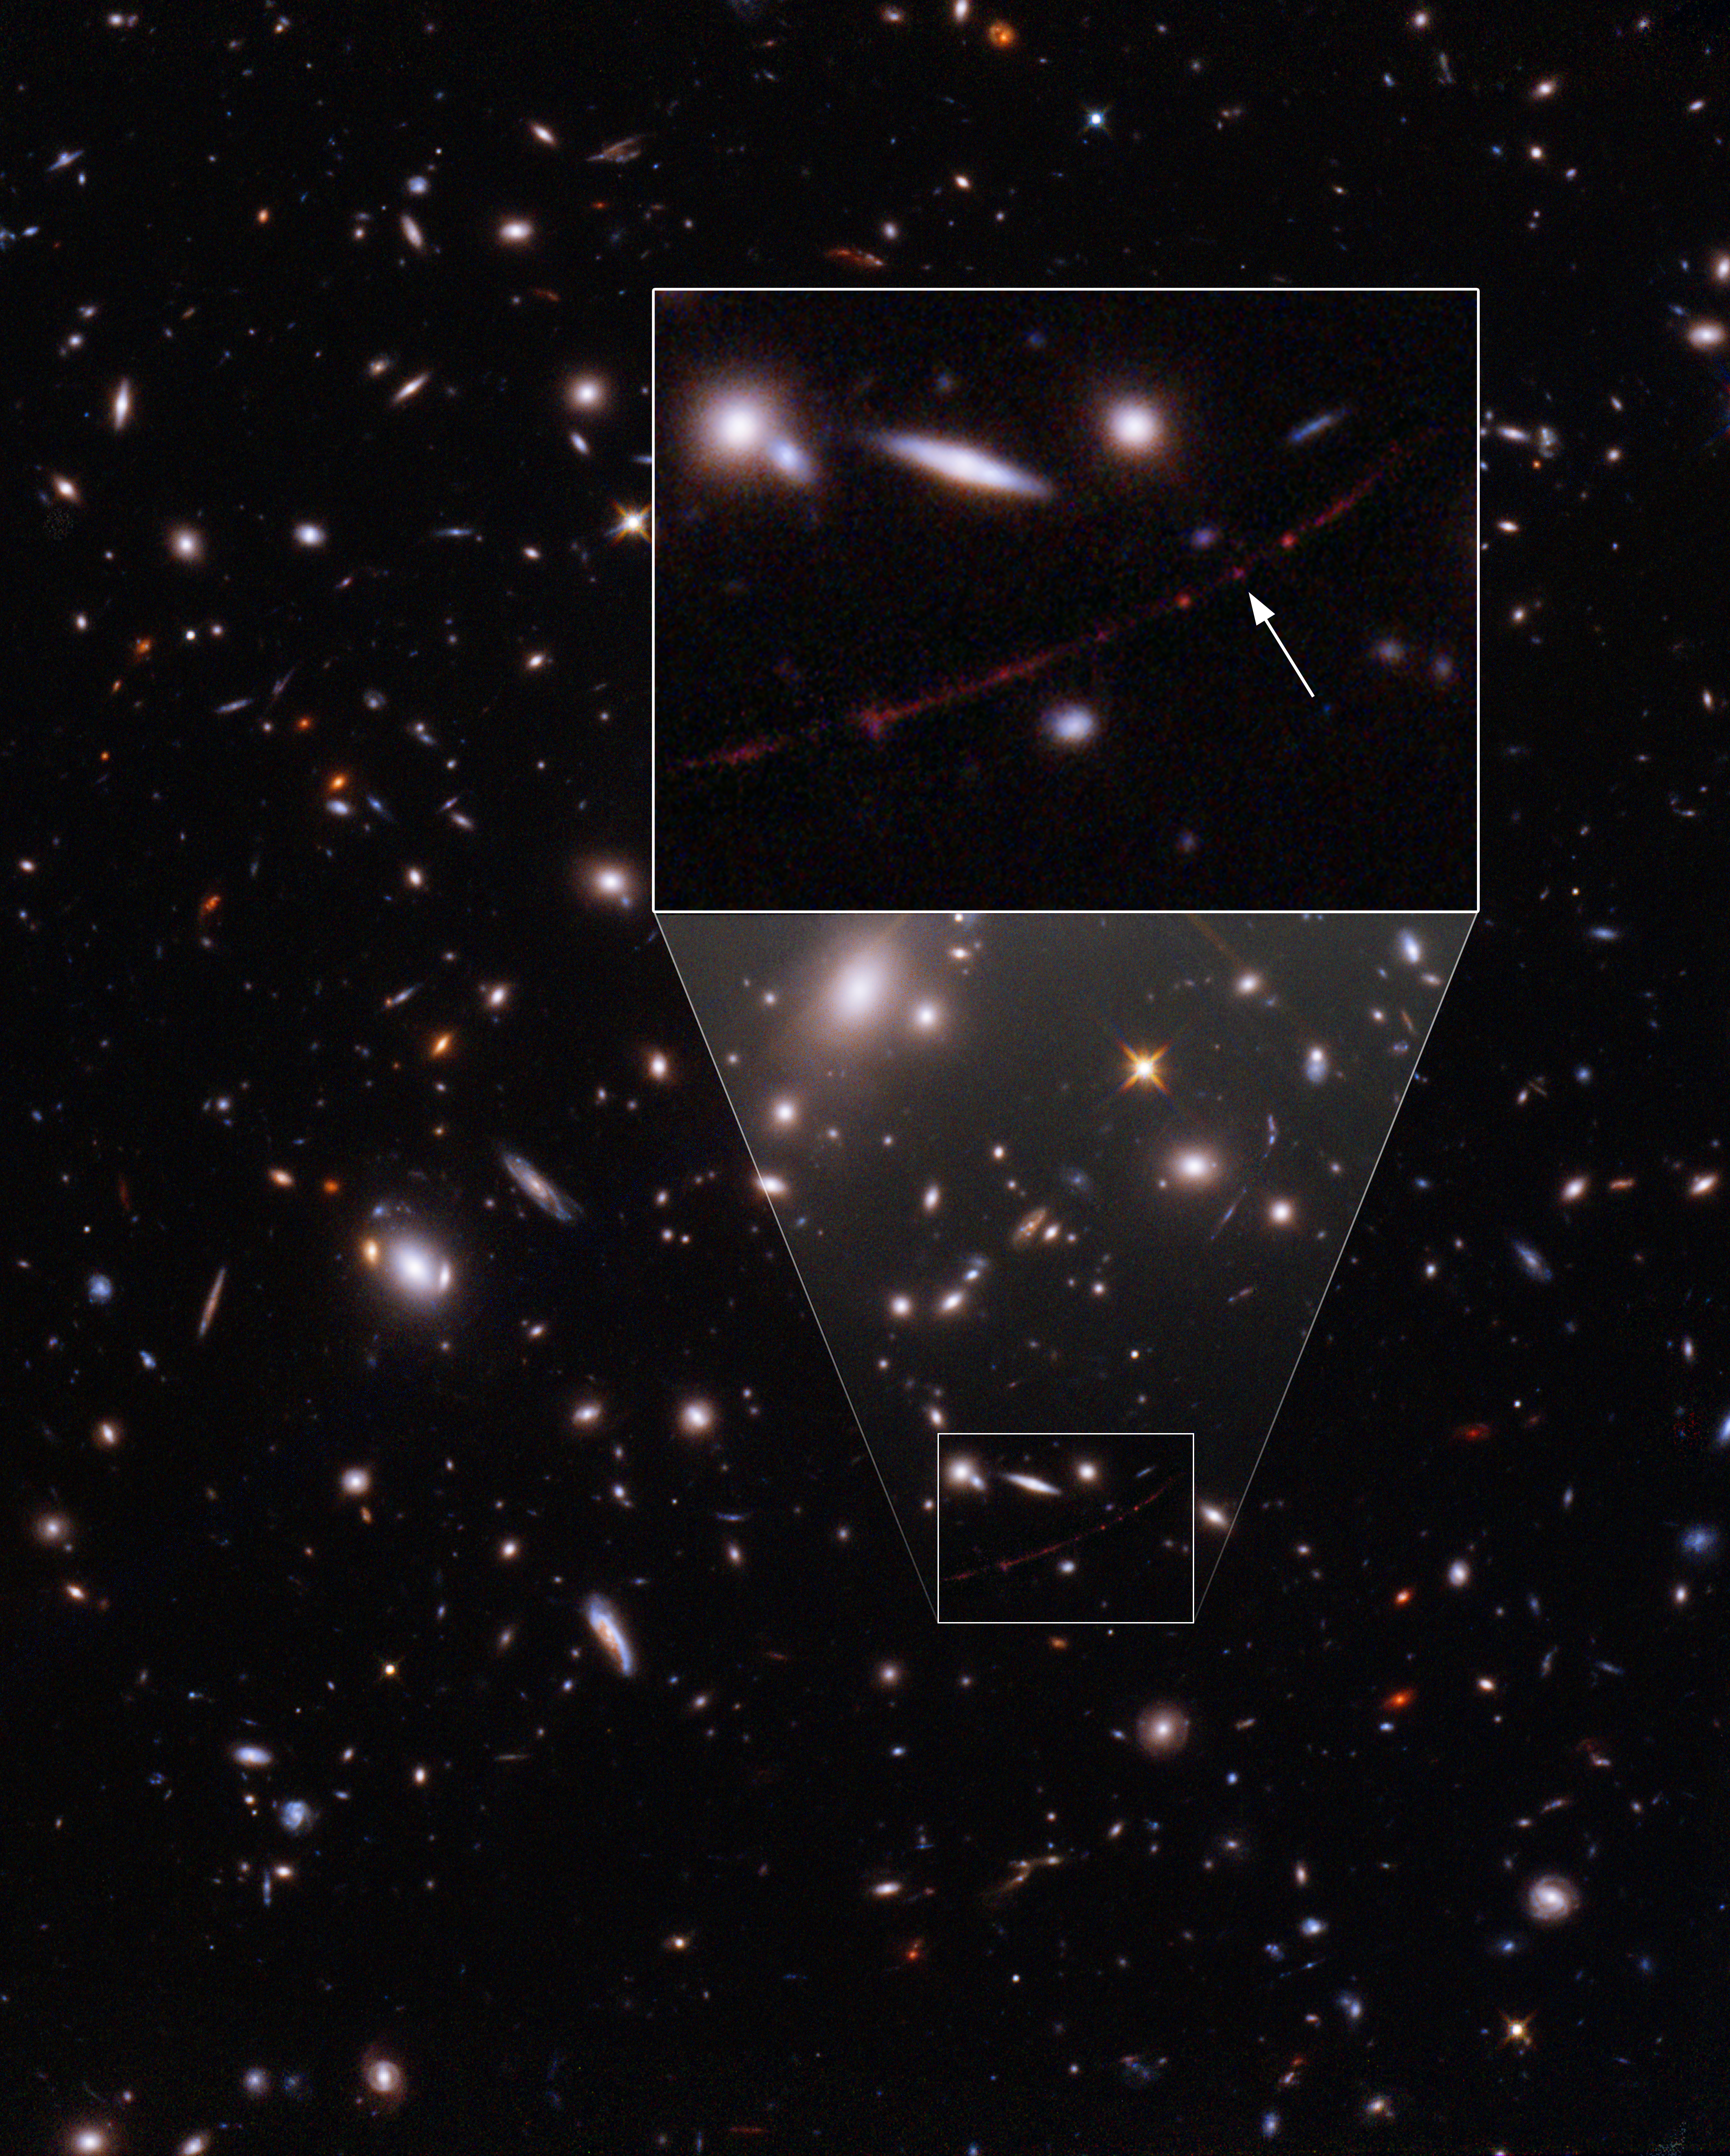

The Sunrise Arc Galaxy with Lensed Star Earendel (Annotated)

The star nicknamed Earendel (indicated here with an arrow) is positioned along a ripple in spacetime that gives it extreme magnification, allowing it to emerge into view from its host galaxy, which appears as a red smear across the sky. The whole scene is viewed through the distorted lens created by a massive galaxy cluster in the intervening space, which allows the galaxy's features to be seen, but also warps their appearance—an effect astronomers call gravitational lensing. The red dots on either side of Earendel are one star cluster that is mirrored on either side of the ripple, a result of the gravitational lensing distortion. The entire galaxy, called the Sunrise Arc, appears three times, and knots along its length are more mirrored star clusters. Earendel's unique position right along the line of most extreme magnification allows it to be detected, even though it is not a cluster.

With this observation, the NASA/ESA Hubble Space Telescope has established an extraordinary new benchmark: detecting the light of a star that existed within the first billion years after the Universe’s birth in the Big Bang (at a redshift of 6.2) — the most distant individual star ever seen. This sets up a major target for the NASA/ESA/CSA James Webb Space Telescope in its first year.

Credit: NASA, ESA, B. Welch (JHU), D. Coe (STScI), A. Pagan (STScI)